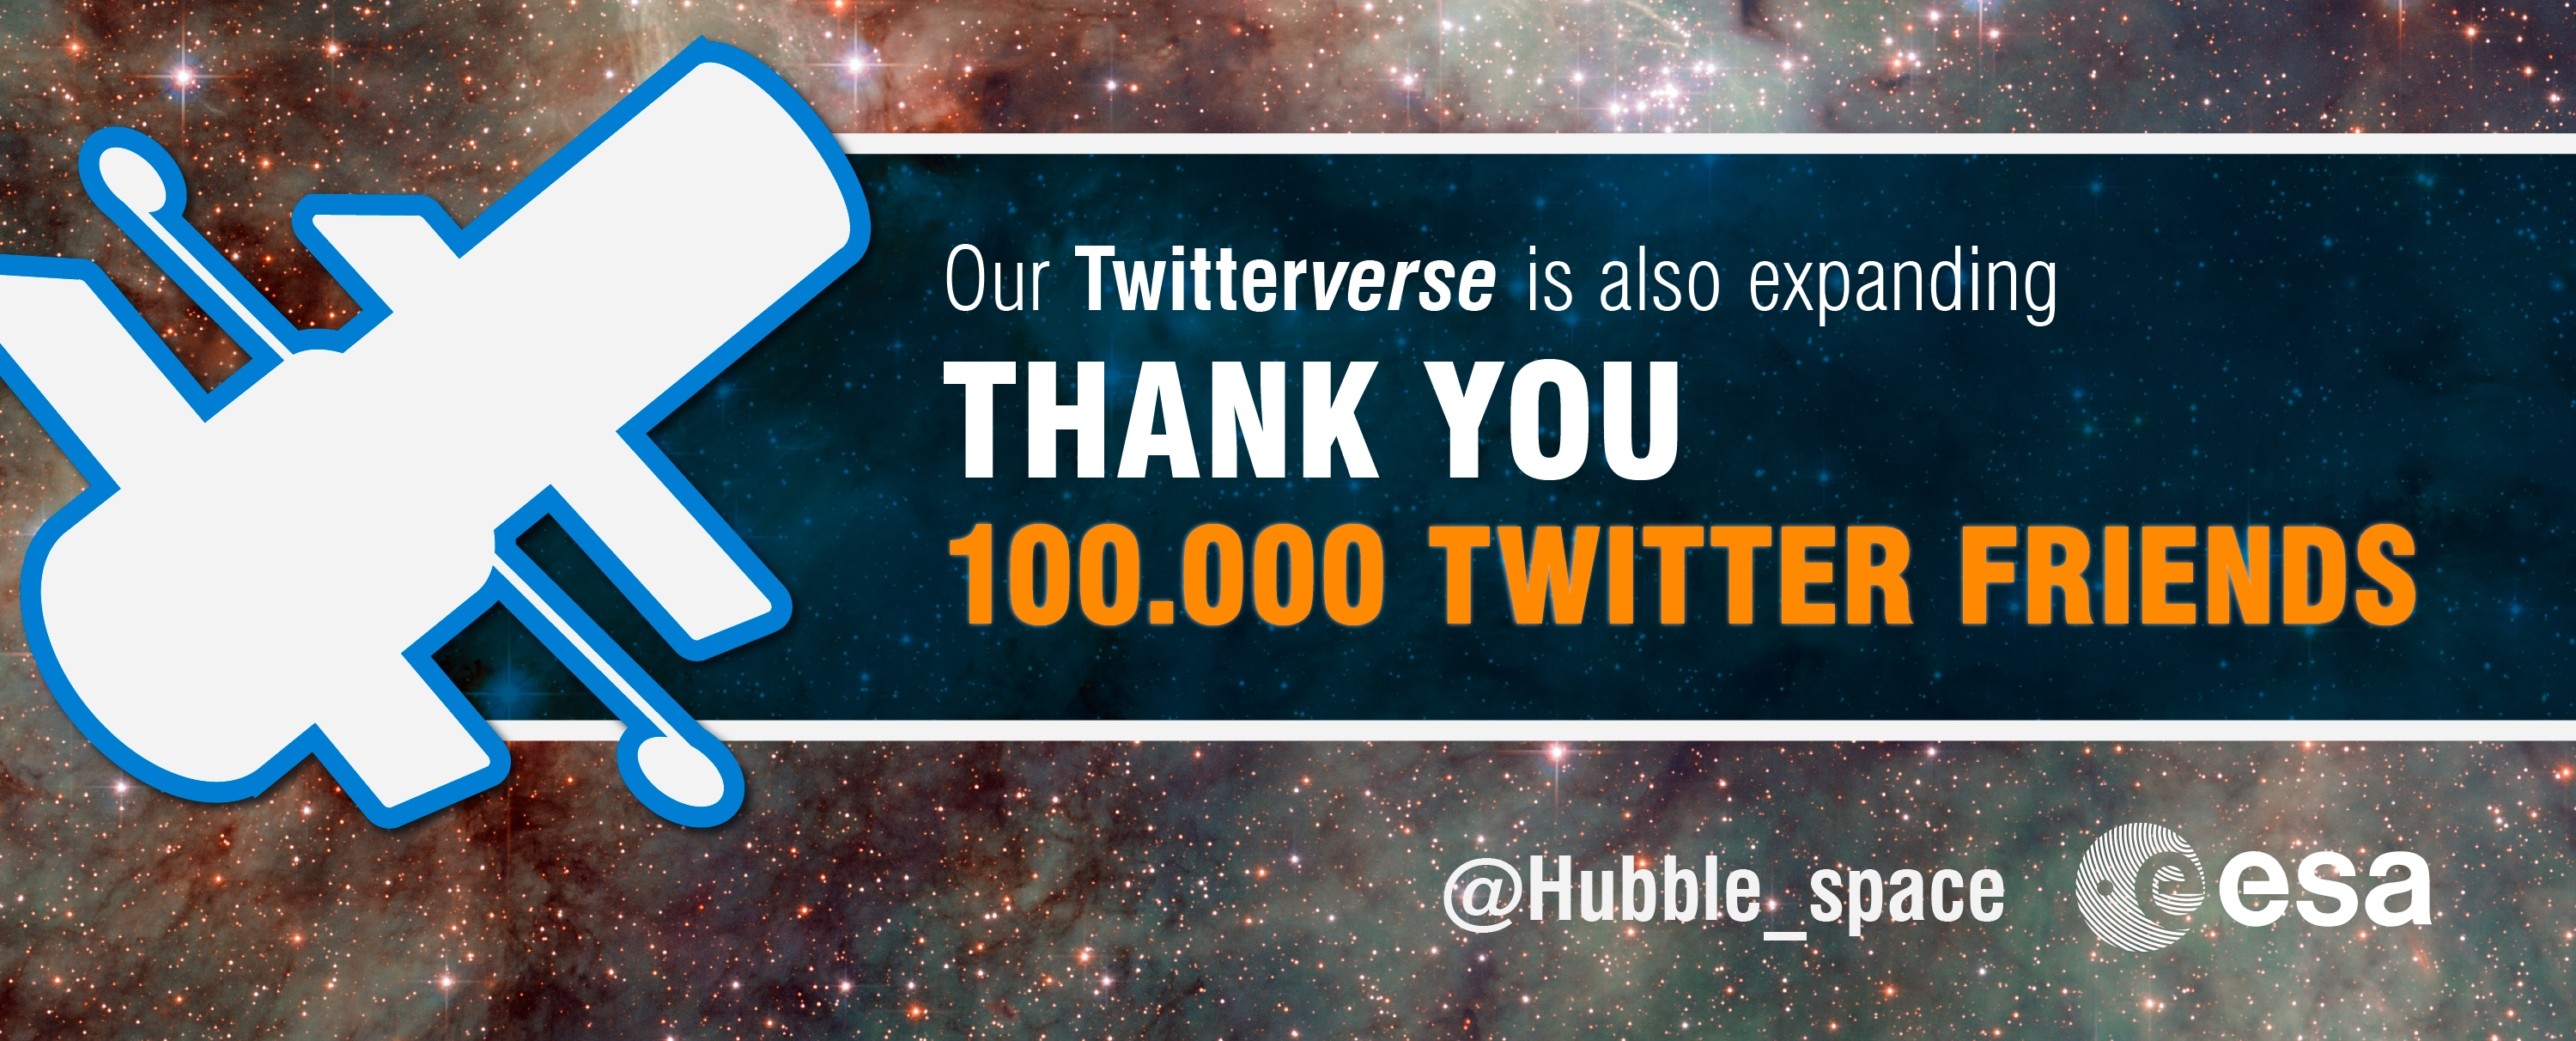

ESA/Hubble reaches 100 000 Twitter followers

The ESA Hubble Space Telescope Twitter account welcomed its 100 000th follower. Our Twitter feed brings Hubble Space Telescope fans the latest news from ESA, as NASA’s partner in this international project. A huge thanks to all our followers for their continued curiosity and support, which helps us to reach more people than ever before.

Credit: ESA/Hubble